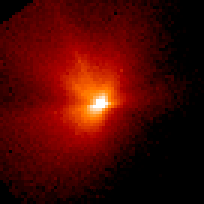

Comet Hale-Bopp

This is a series of Hubble Space Telescope observations of the region around the nucleus of Hale-Bopp, taken on eight different dates since September 1995. They chronicle changes in the evolution of the nucleus as it moves ever closer to, and is warmed by, the sun.

Credit: Harold Weaver (Johns Hopkins University) and NASA/ESA